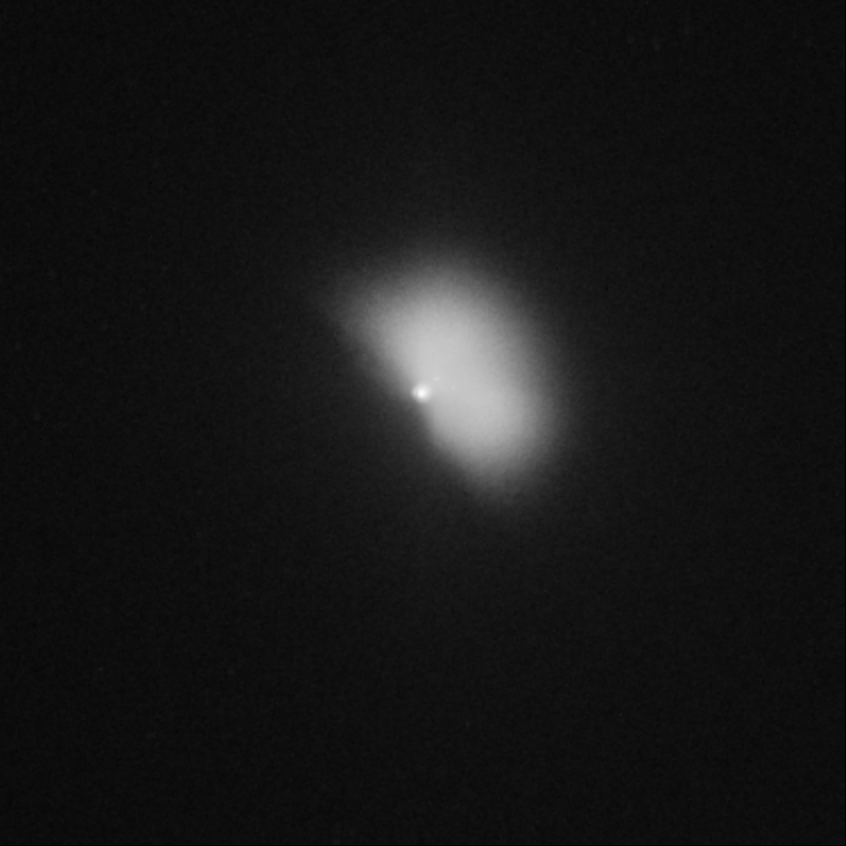

Hubble captures Deep Impact's collision with a comet (view 88 minutes after impact)

The expansion of the comet debris cloud continues.

Credit: NASA, ESA, P. Feldman (Johns Hopkins University), and H. Weaver (Johns Hopkins University Applied Physics Lab)